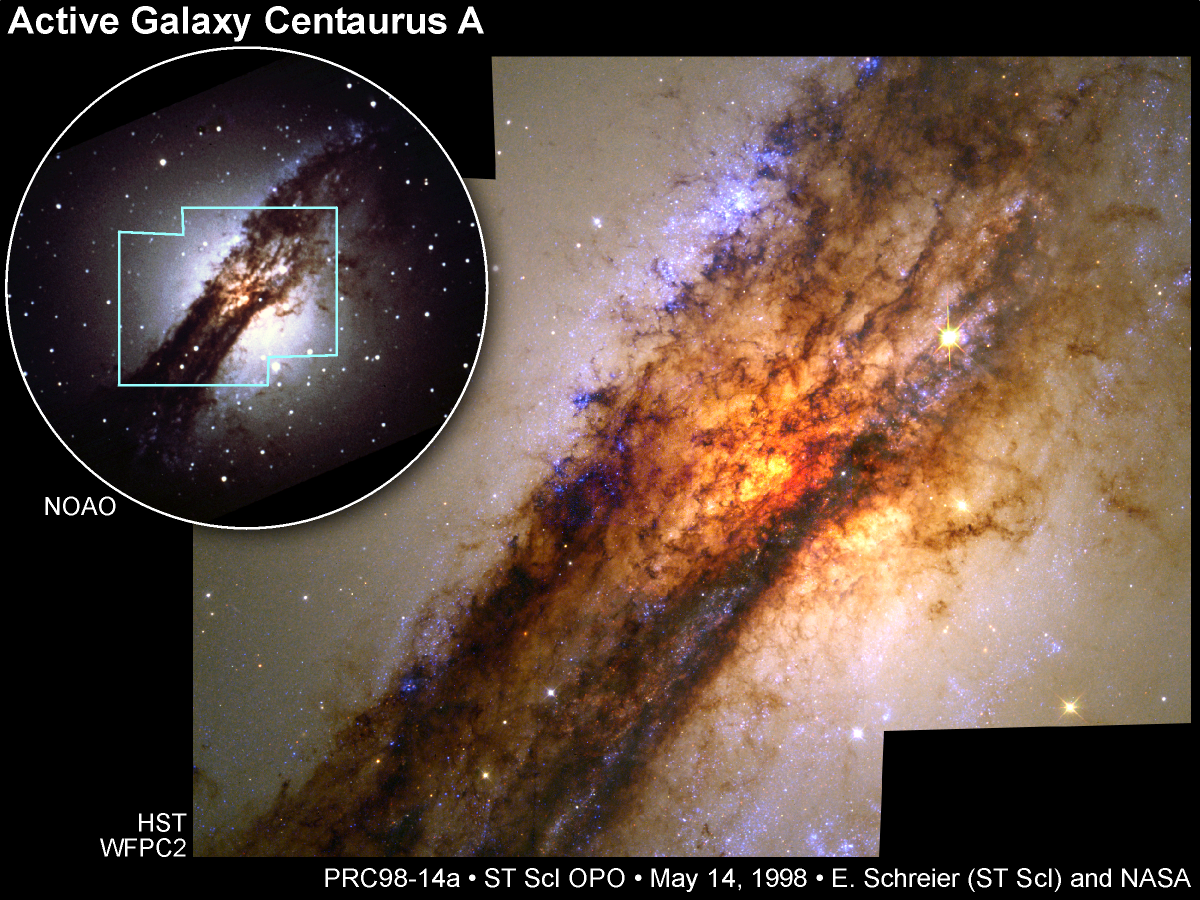

Turbulent Cauldron of Starbirth in Nearby Active Galaxy

The NASA/ESA Hubble Space Telescope offers a stunning unprecedented close-up view of a turbulent firestorm of starbirth along a nearly edge-on dust disk girdling Centaurus A, the nearest active galaxy to Earth.

Credit: E.J. Schreier, (STScI) and NASA/ESA